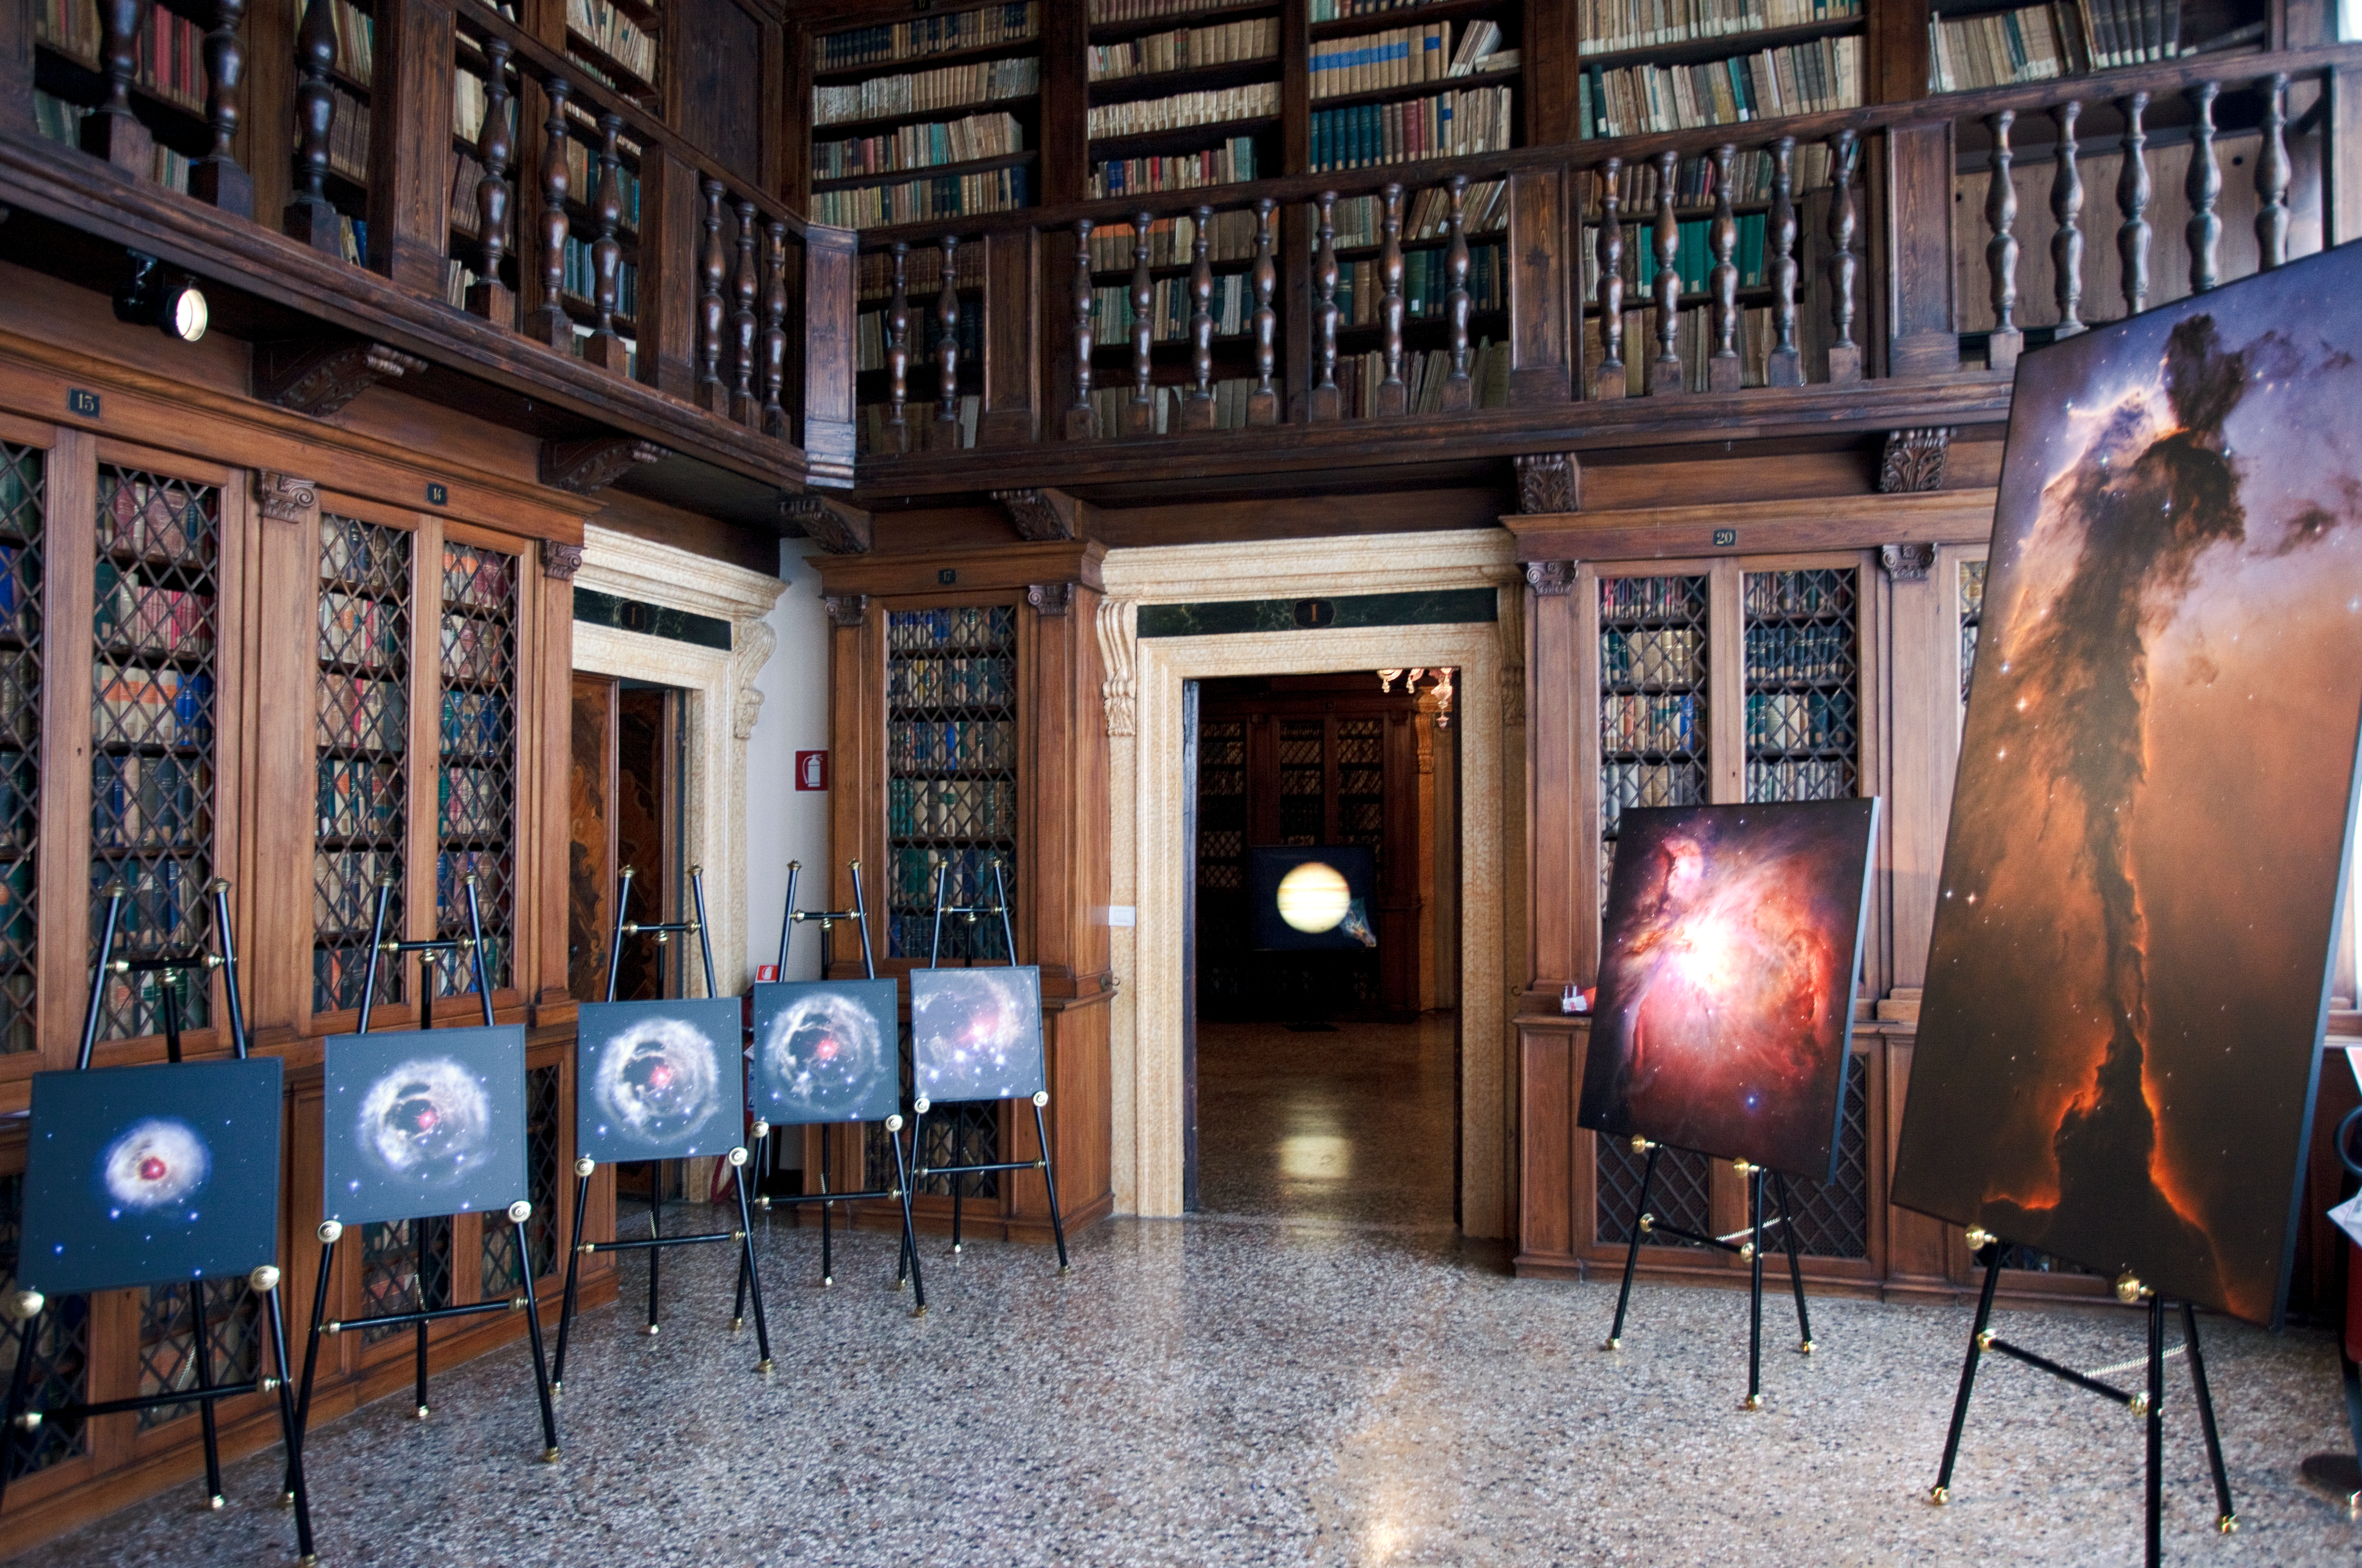

Hubble images on display

This image shows Hubble images of light echoes and star forming regions on display at the “Il telescopio spaziale Hubble alle frontiere dell’universo” exhibition in Venice, Italy in October 2010.

Credit: ESA/Hubble